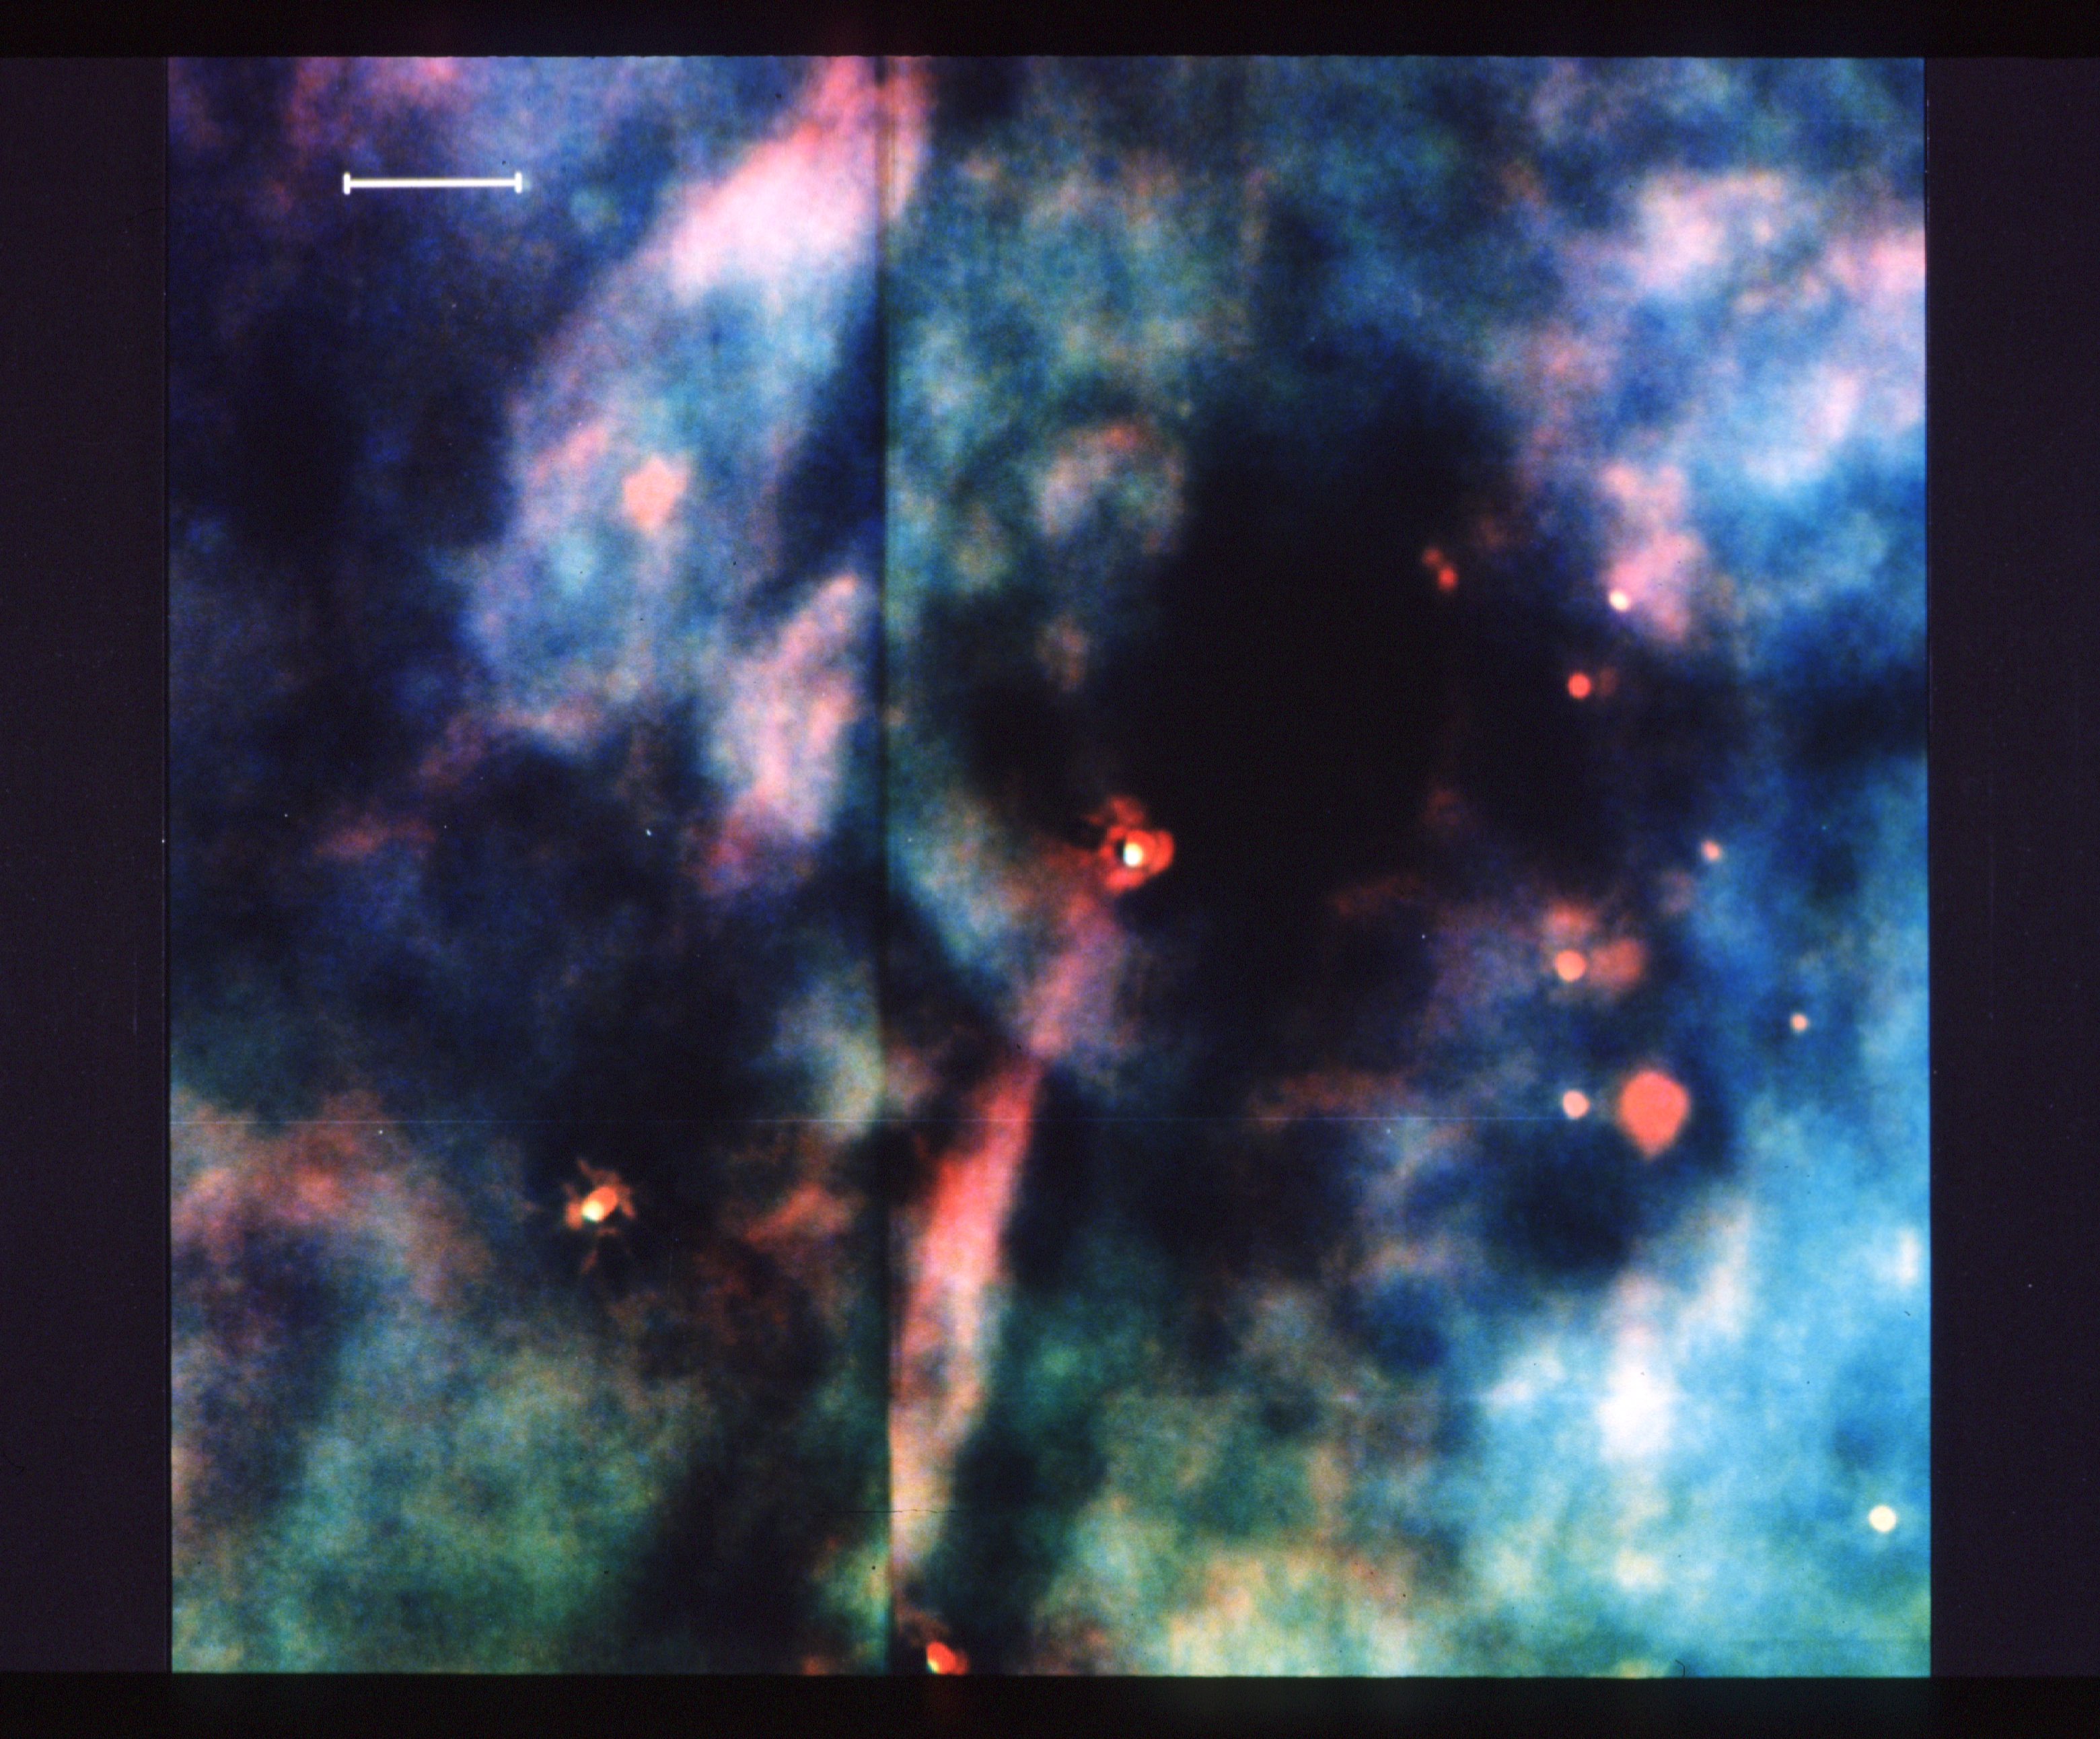

NASA/ESA Hubble Space Telescope Discovers Jet Structure in the Orion Nebula

This photograph, made with the Wide Field Camera on NASA/ESA Hubble Space Telescope, reveals the detailed structure of a newly discovered jet of material streaming away from a young star in the Orion Nebula. While similar jets have been seen from the ground, the new observations reveal the structure of this jet with unprecedented clarity. Of particular significance is the fact that the jet is bright along its edges in the light of gaseous sulfur atoms (shown here in red). Experts believe this structure to be due to shock fronts at the boundary between the jet and the surrounding gas of the Orion Nebula. Astronomers say that jets such as this are of interest because they provide clues about how stars form and how young stars affect their environment. The field shown is only a very small portion of the "Great Nebula" in Orion, which is a tremendous "stellar nursery" about 7 light years in size and located approximately 1500 light years from the Earth. The nebula glows in a number of distinct colors, each due to atoms of a different chemical element. In the picture, emission from ionised sulfur items are shown in red, light from ionised oxygen atoms is shown in blue, and light from hydrogen atoms is shown in green. The Orion Nebula glows because of the intense ultraviolet light from a cluster of hot young stars within it. The detailed structural information in these images, which show features that are smaller than our solar system (about 6 light hours across), is possible thanks to the high spatial resolution (sharpness) of images obtained with the Hubble Space Telescope. Astronomers say that despite the spherical aberration of the telescope's main mirror, about 15% of the light from an object is still focussed into a very tight image, and that allows the small scale structure of objects to be seen better than in ground based images which are blurred by the earth's atmosphere. The images shown here have been computer processed to partially correct for the effect of the mirror's flaw. The Wide Field/Planetary Camera was designed and built by the Jet Propulsion Laboratory, which is operated by the California Institute of Technology.

Credit: NASA/ESA